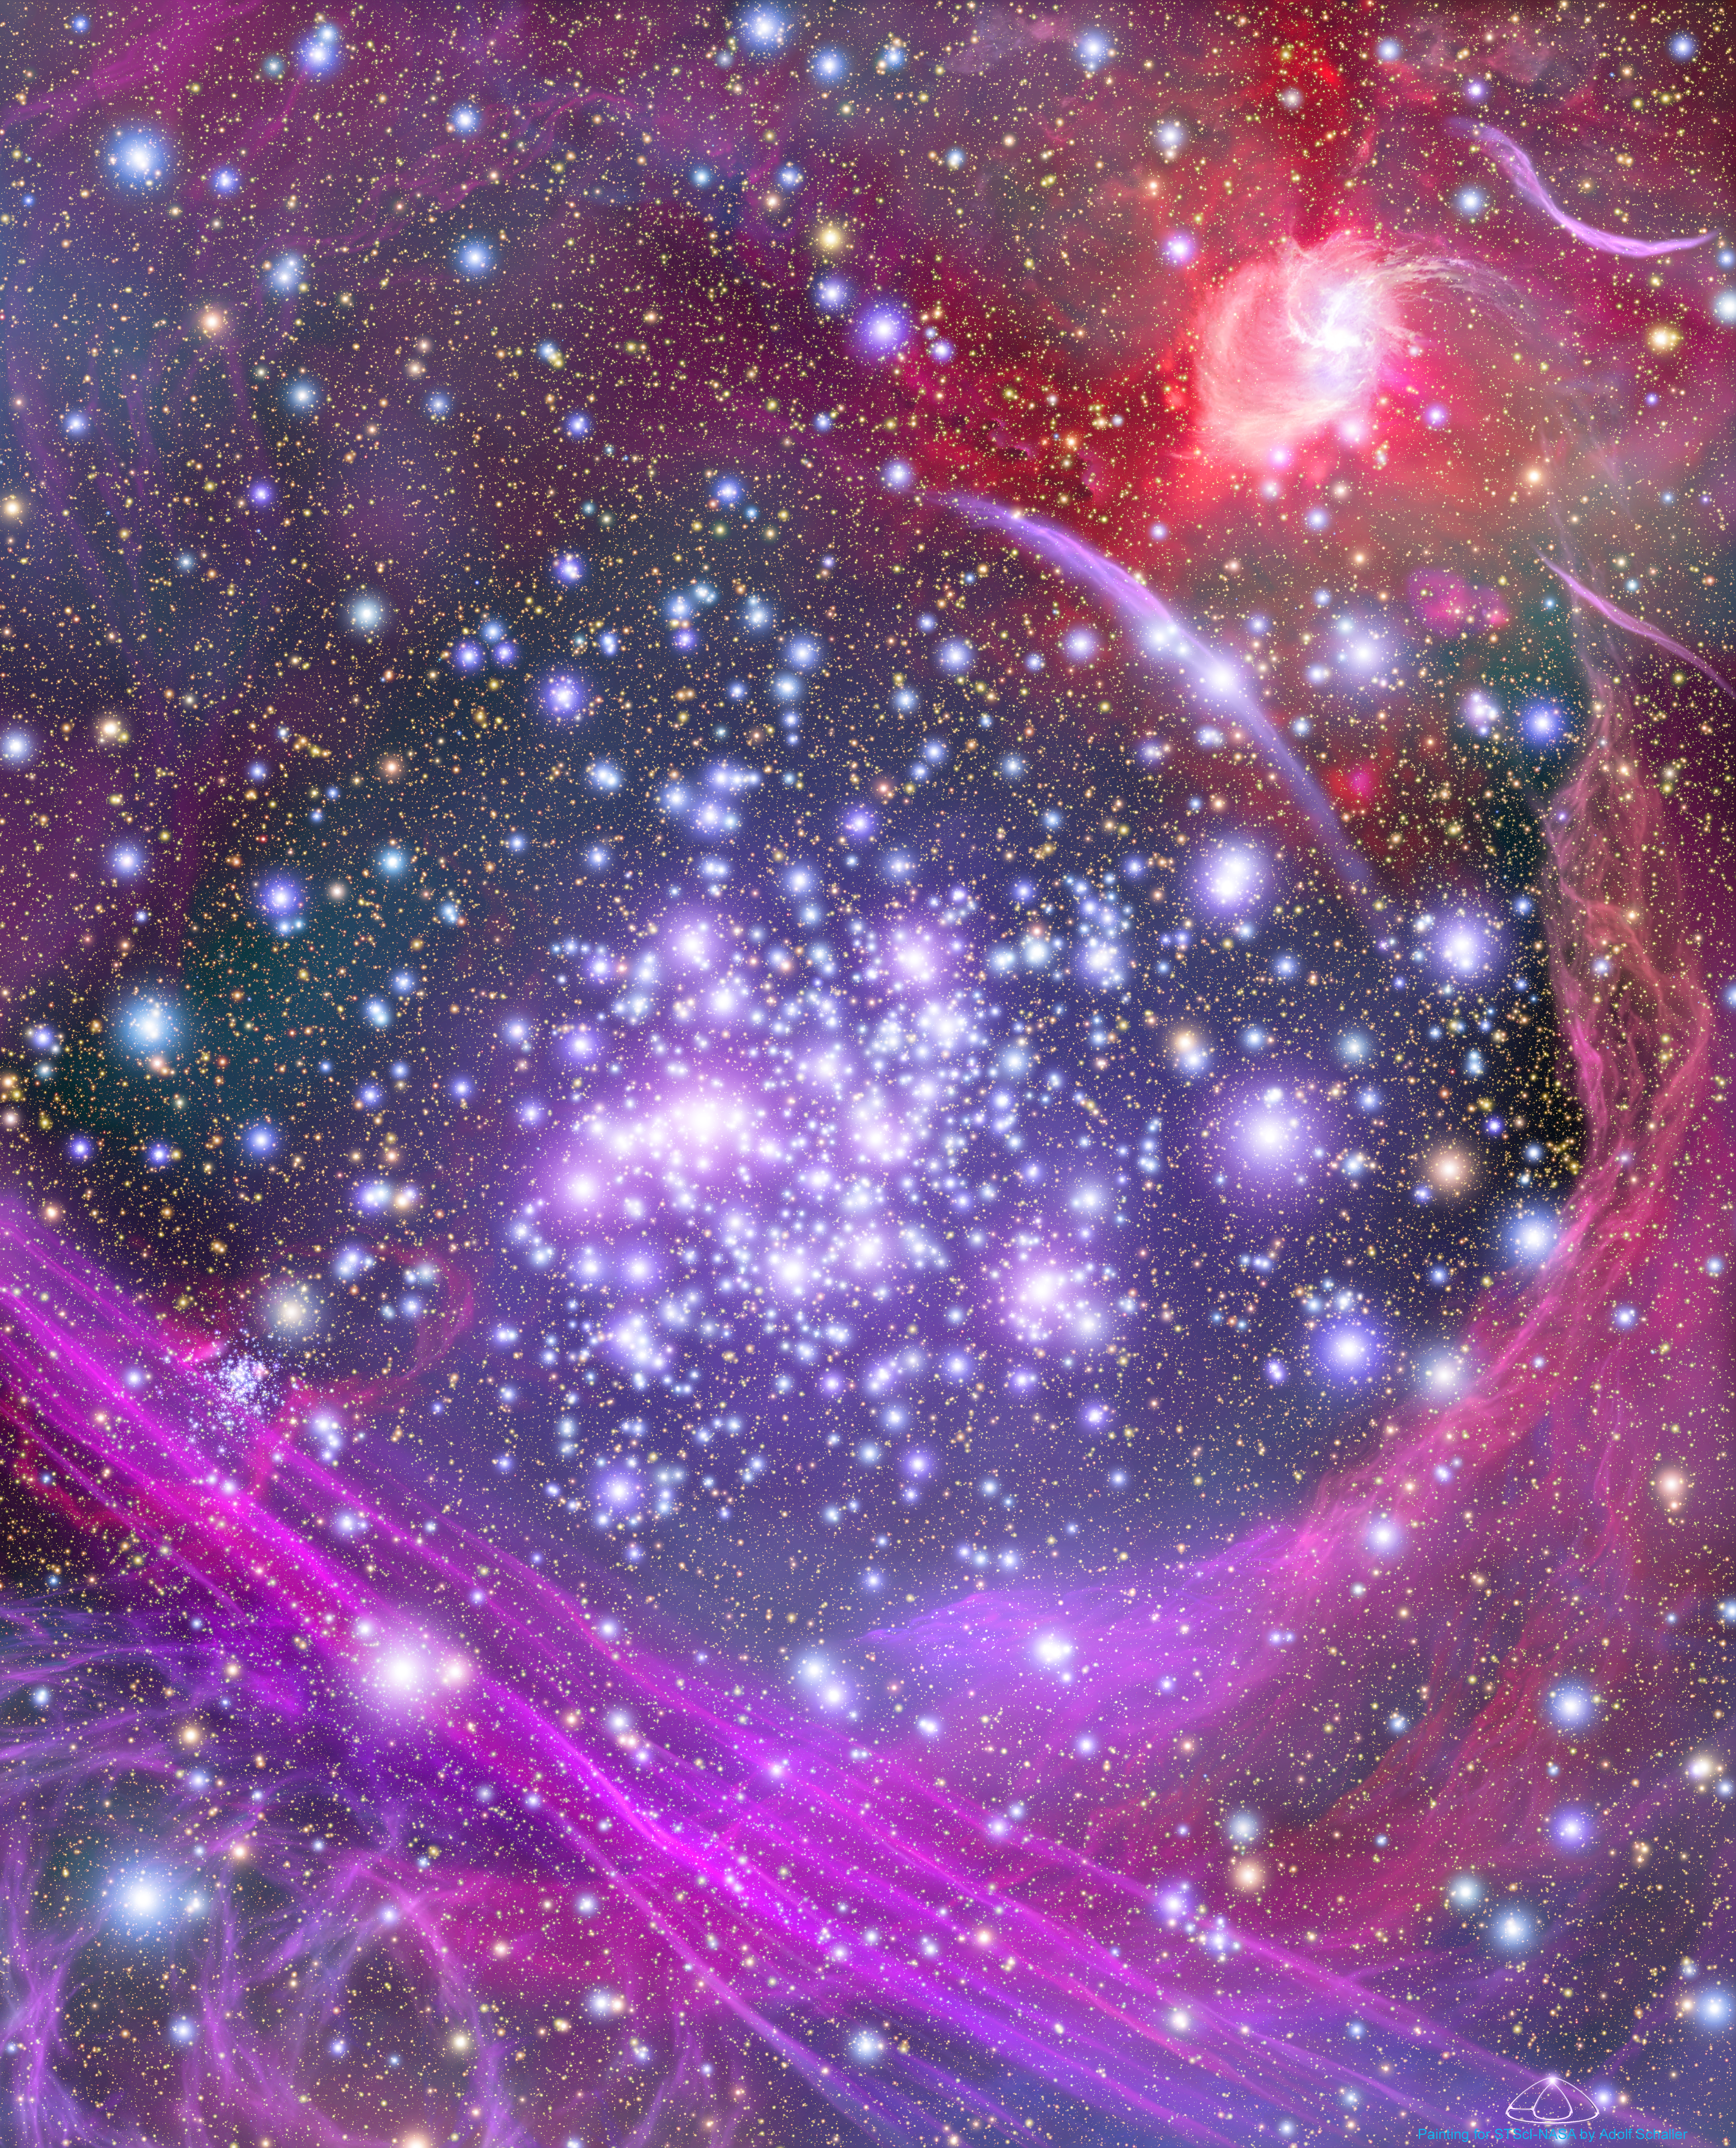

Artist's Concept of the Arches Cluster

This artist's impression shows how the Arches star cluster appears from deep inside the hub of our Milky Way Galaxy. Although hidden from our direct view, the massive cluster lies 25,000 light-years away and is the densest known gathering of young stars in our galaxy. The illustration is based on infrared observations with Hubble and with ground-based telescopes, which pierced our galaxy's dusty core and snapped images of the luminous cluster of about 2,000 stars.

Credit: NASA, ESA and A. Schaller (for STScI)